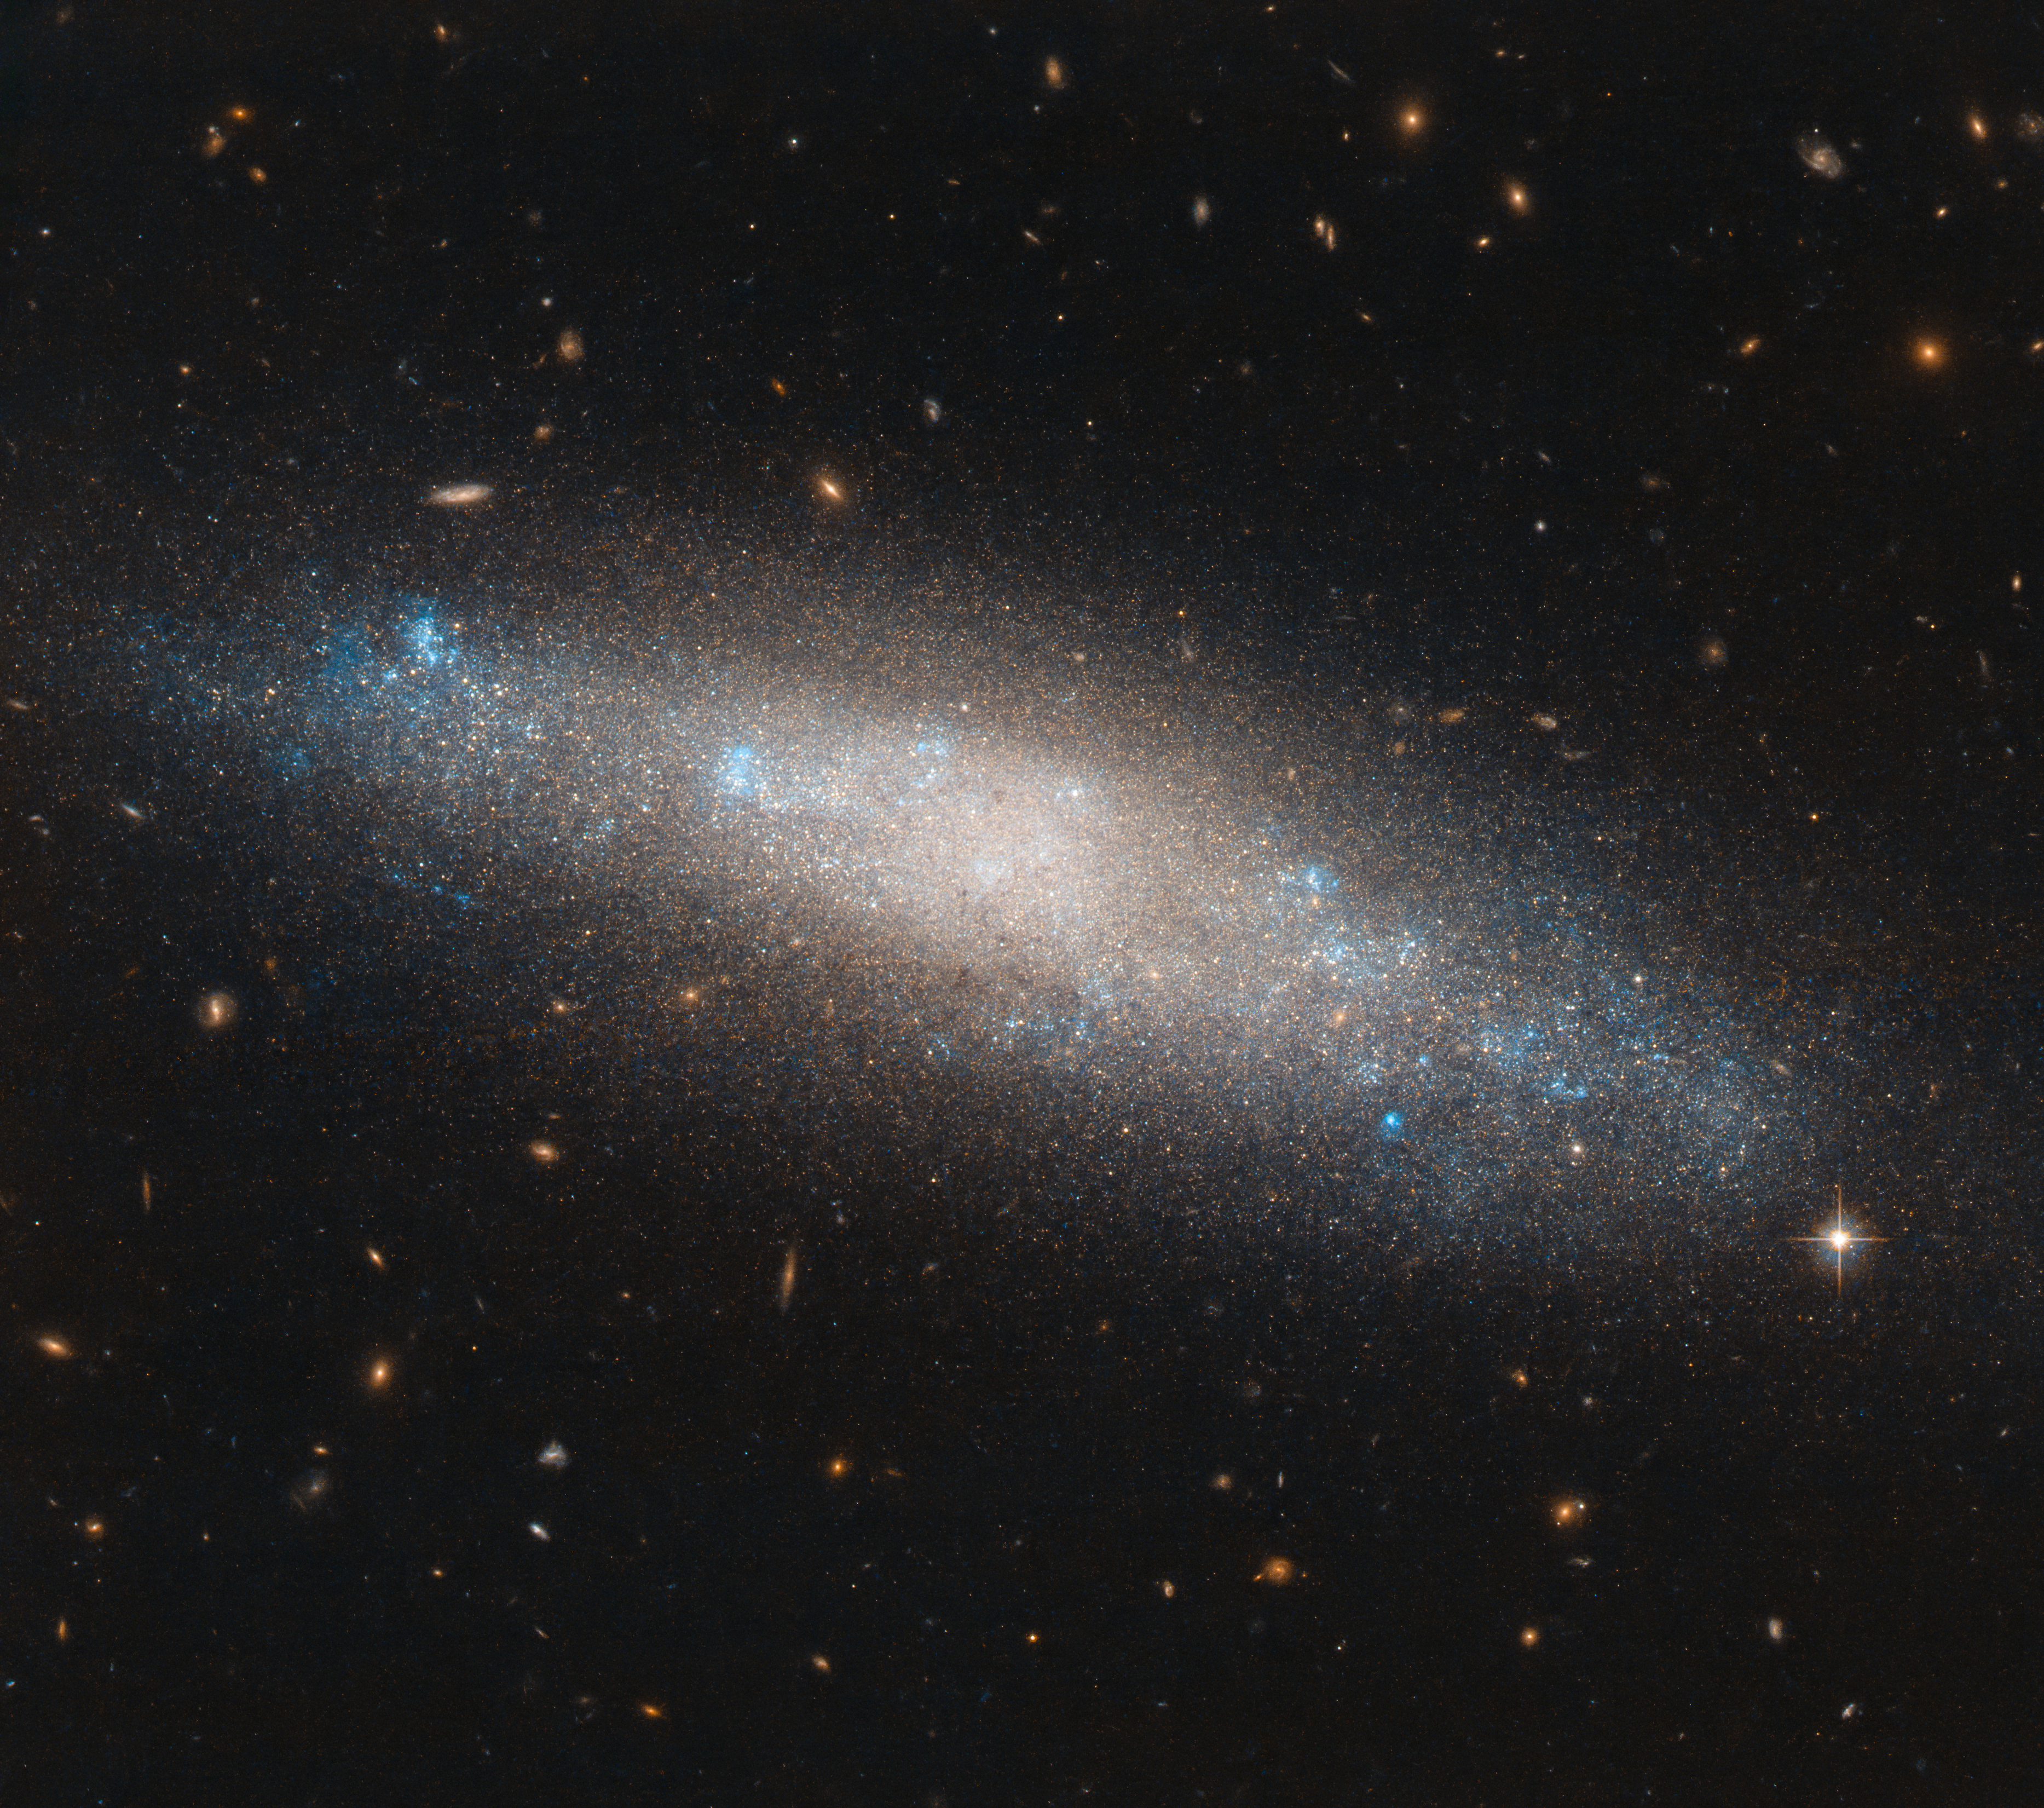

Placed Among the Stars

This smattering of celestial sequins is a spiral galaxy named NGC 4455, located in the northern constellation of Coma Berenices (Berenice’s Hair). This might sound like an odd name for a constellation — and in fact it is somewhat unusual; it’s the only modern constellation to be named in honour of a real person from history: Queen Berenice II of Egypt.

The story of Queen Berenice II is an interesting one. A ruling queen of the ancient Greek city of Cyrene in modern-day Libya, and later a queen of Ptolemaic Egypt through her marriage to her cousin Ptolemy III Euergetes, Berenice became known for sacrificing locks of her hair as an offering to ensure her husband’s safe return from battle. Her husband did indeed return safely and her hair, which she had left in a Zephyrium temple, had disappeared — it had apparently been stolen and placed among the stars.

Should it be located in NGC 4455, it travelled a long way. The galaxy is about 45 million light-years away. This image was taken by the NASA/ESA Hubble Space Telescope’s Advanced Camera for Surveys.

Credit: ESA/Hubble & NASA, I. Karachentsev et al.